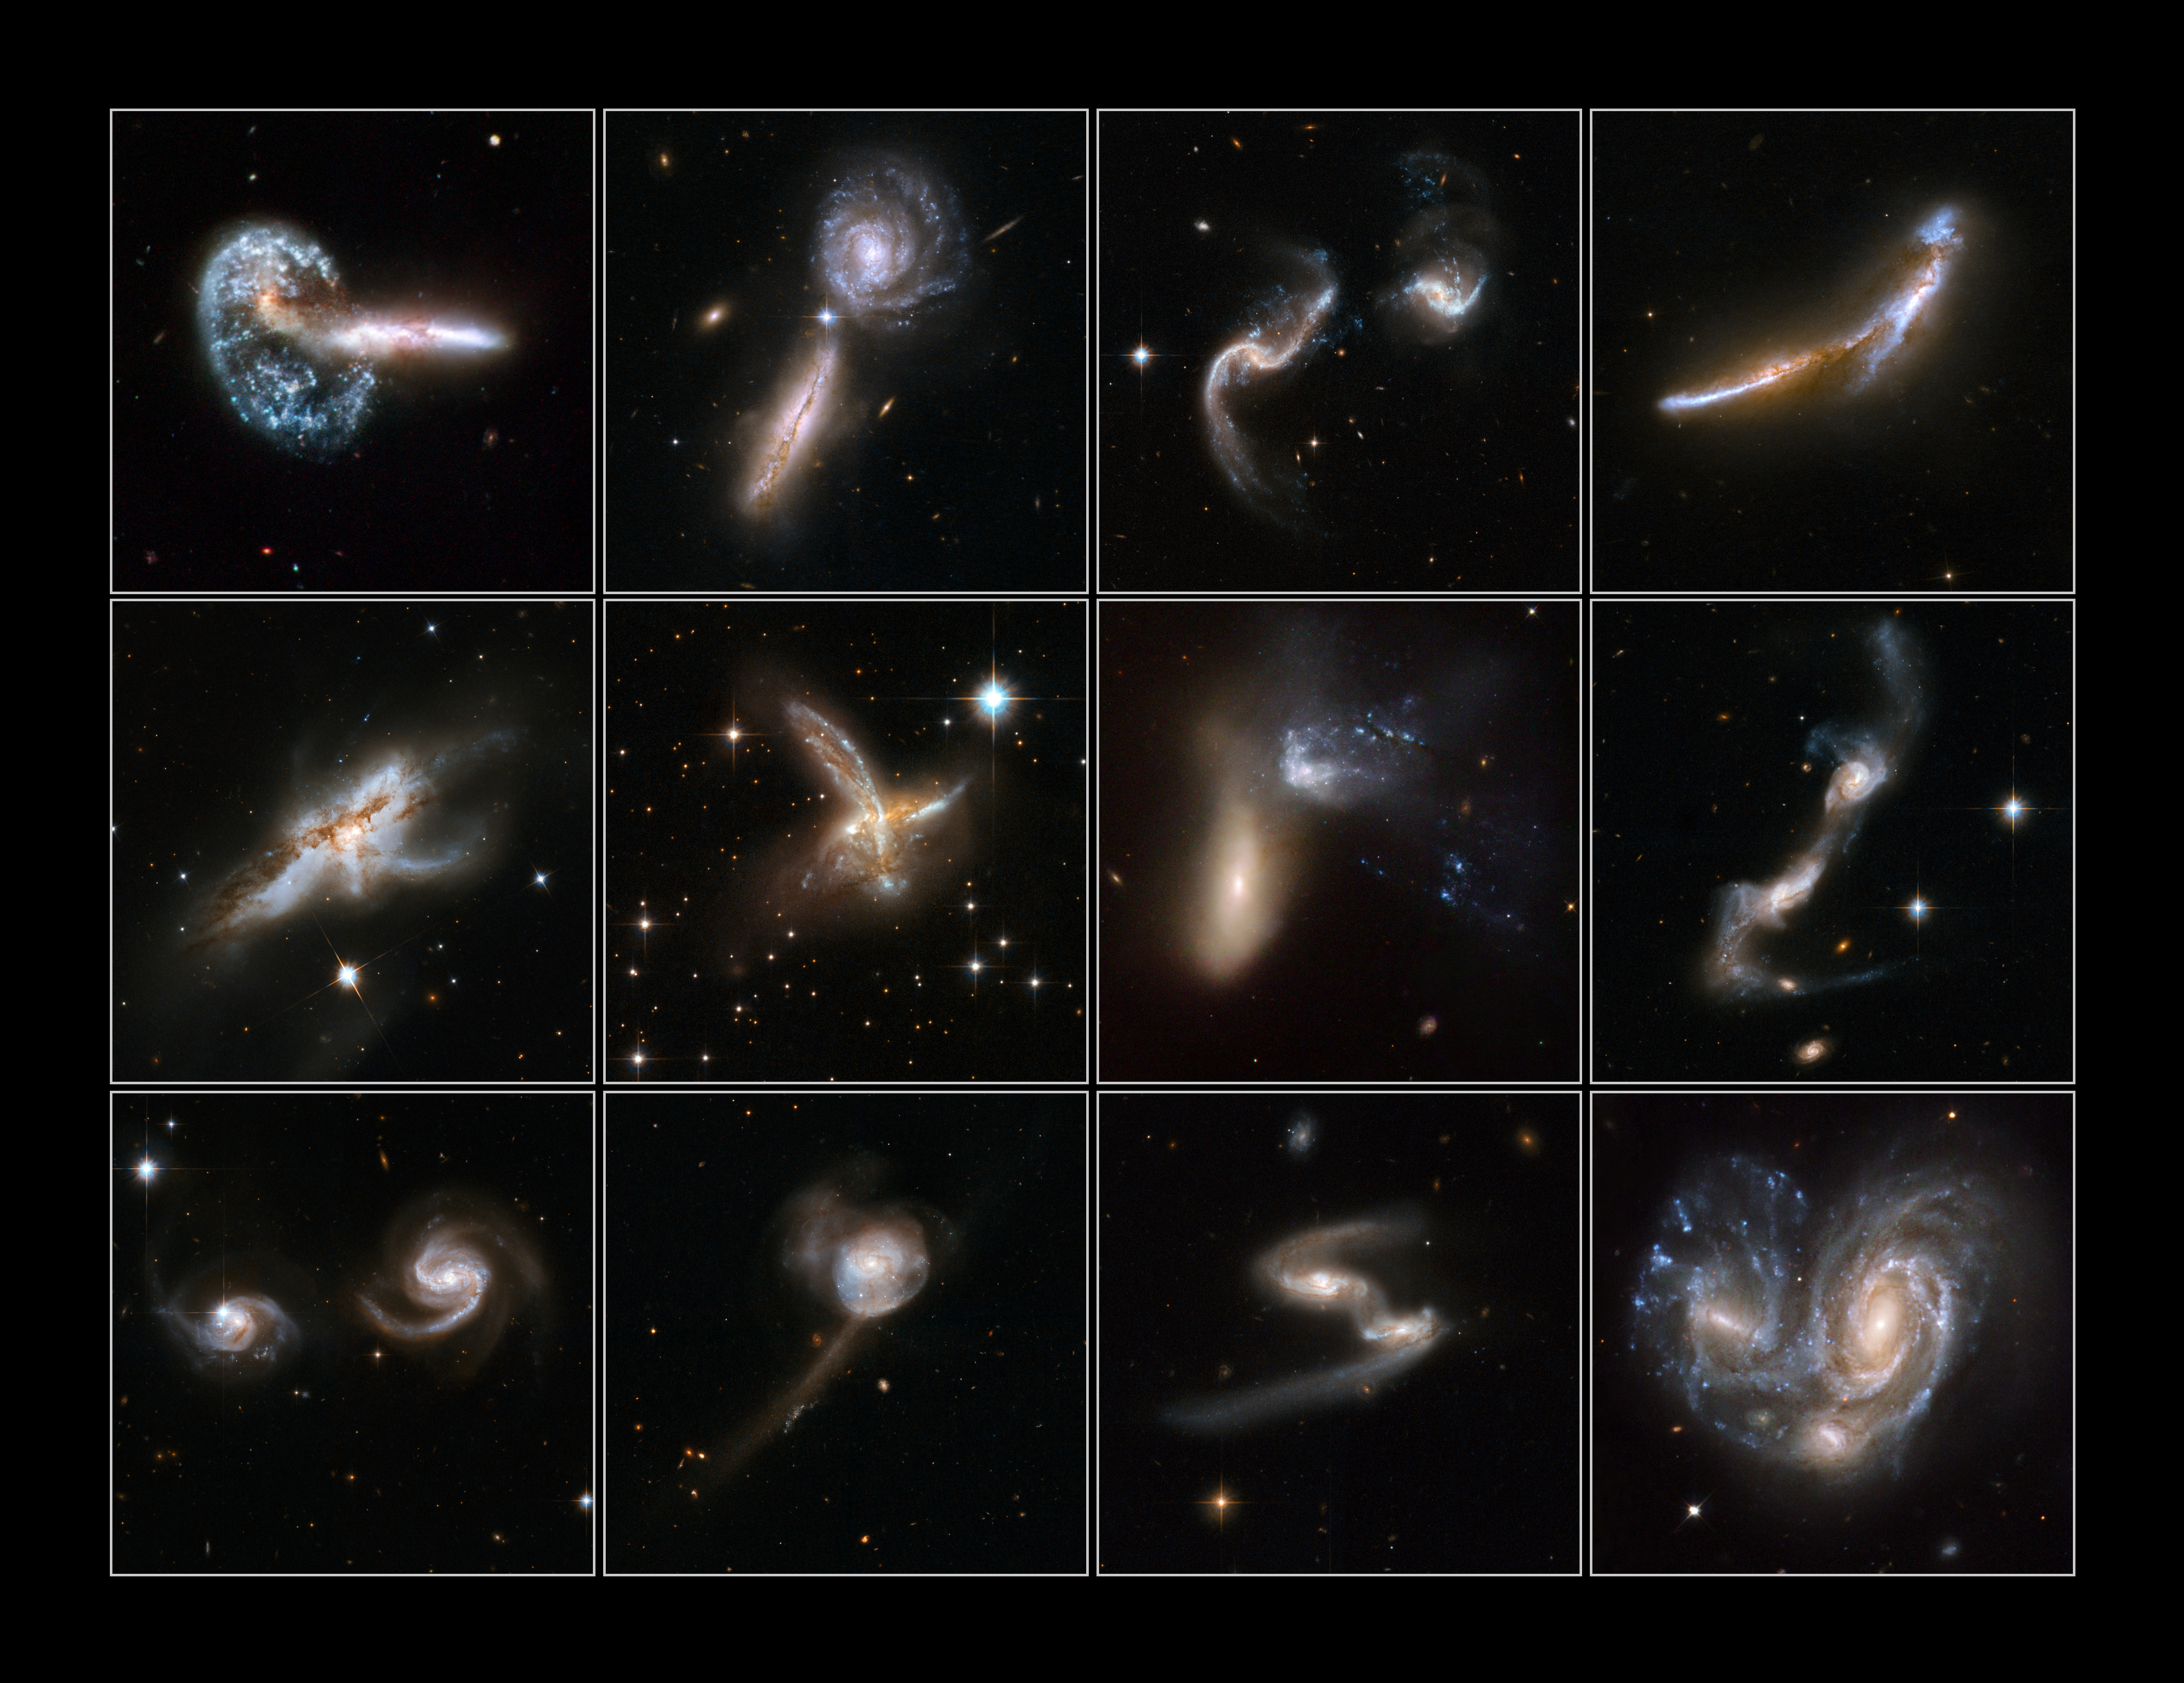

Galaxies Gone Wild! - Top 12 images

Interacting galaxies are found throughout the Universe, sometimes as dramatic collisions that trigger bursts of star formation, on other occasions as stealthy mergers that result in new galaxies. A series of 59 new images of colliding galaxies has been released from the several terabytes of archived raw images from the NASA/ESA Hubble Space Telescope to mark the 18th anniversary of the telescope's launch. This is the largest collection of Hubble images ever released to the public simultaneously.

This poster shows the best 12 images of the collection.

Credit: NASA, ESA, the Hubble Heritage Team (STScI/AURA)-ESA/Hubble Collaboration and A. Evans (University of Virginia, Charlottesville/NRAO/Stony Brook University), K. Noll (STScI), and J. Westphal (Caltech)